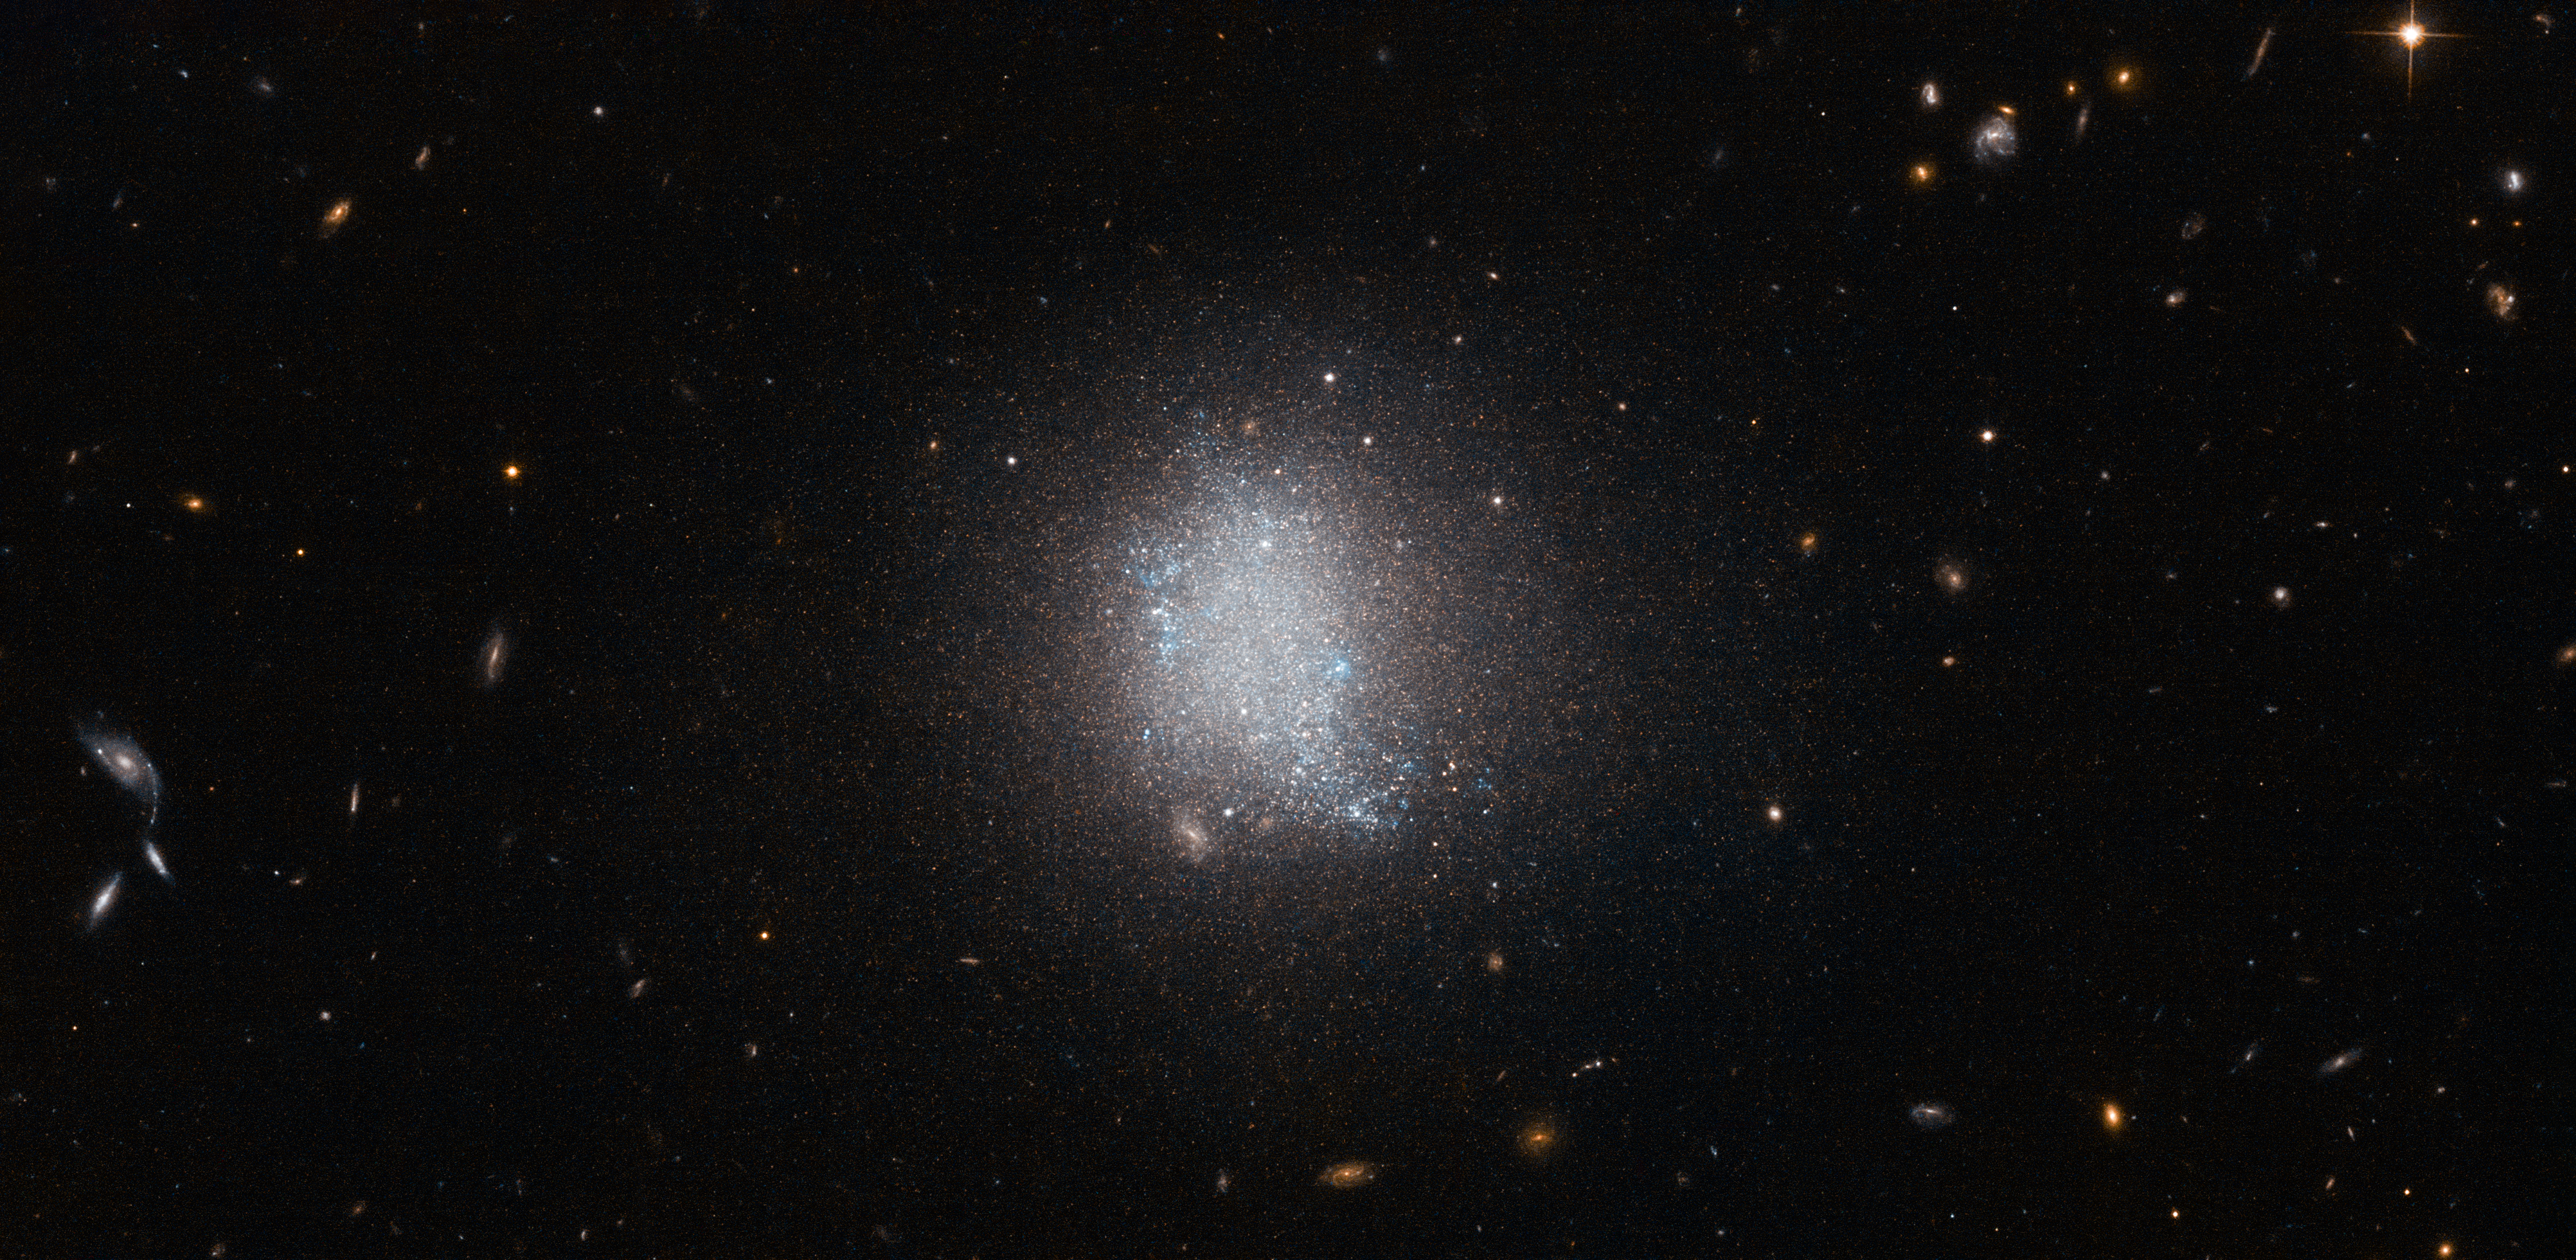

Galactic refurbishment

The smudge of stars at the centre of this NASA/ESA Hubble Space Telescope image is a galaxy known as UGC 5797. UGC 5797 is an emission line galaxy, meaning that it is currently undergoing active star formation. The result is a stellar population that is constantly being refurbished as massive bright blue stars form. Galaxies with prolific star formation are not only veiled in a blue tint, but are key to the continuation of a stellar cycle.

In this image UGC 5797 appears in front of a background of spiral galaxies. Spiral galaxies have copious amounts of dust and gas — the main ingredient for stars — and therefore often also belong to the class of emission line galaxies.

Spiral galaxies have disc-like shapes that drastically vary in appearance depending on the angle at which they are observed. The collection of spiral galaxies in this frame exhibits this attribute acutely: Some are viewed face-on, revealing the structure of the spiral arms, while the two in the bottom left are seen edge-on, appearing as plain streaks in the sky. There are many spiral galaxies, with varying colours and at different angles sprinkled across this image — just take a look.

A version of this image was entered into the Hubble’s Hidden Treasures image processing competition by Luca Limatola.

Credit: ESA/Hubble & NASA
Acknowledgement: Luca Limatola